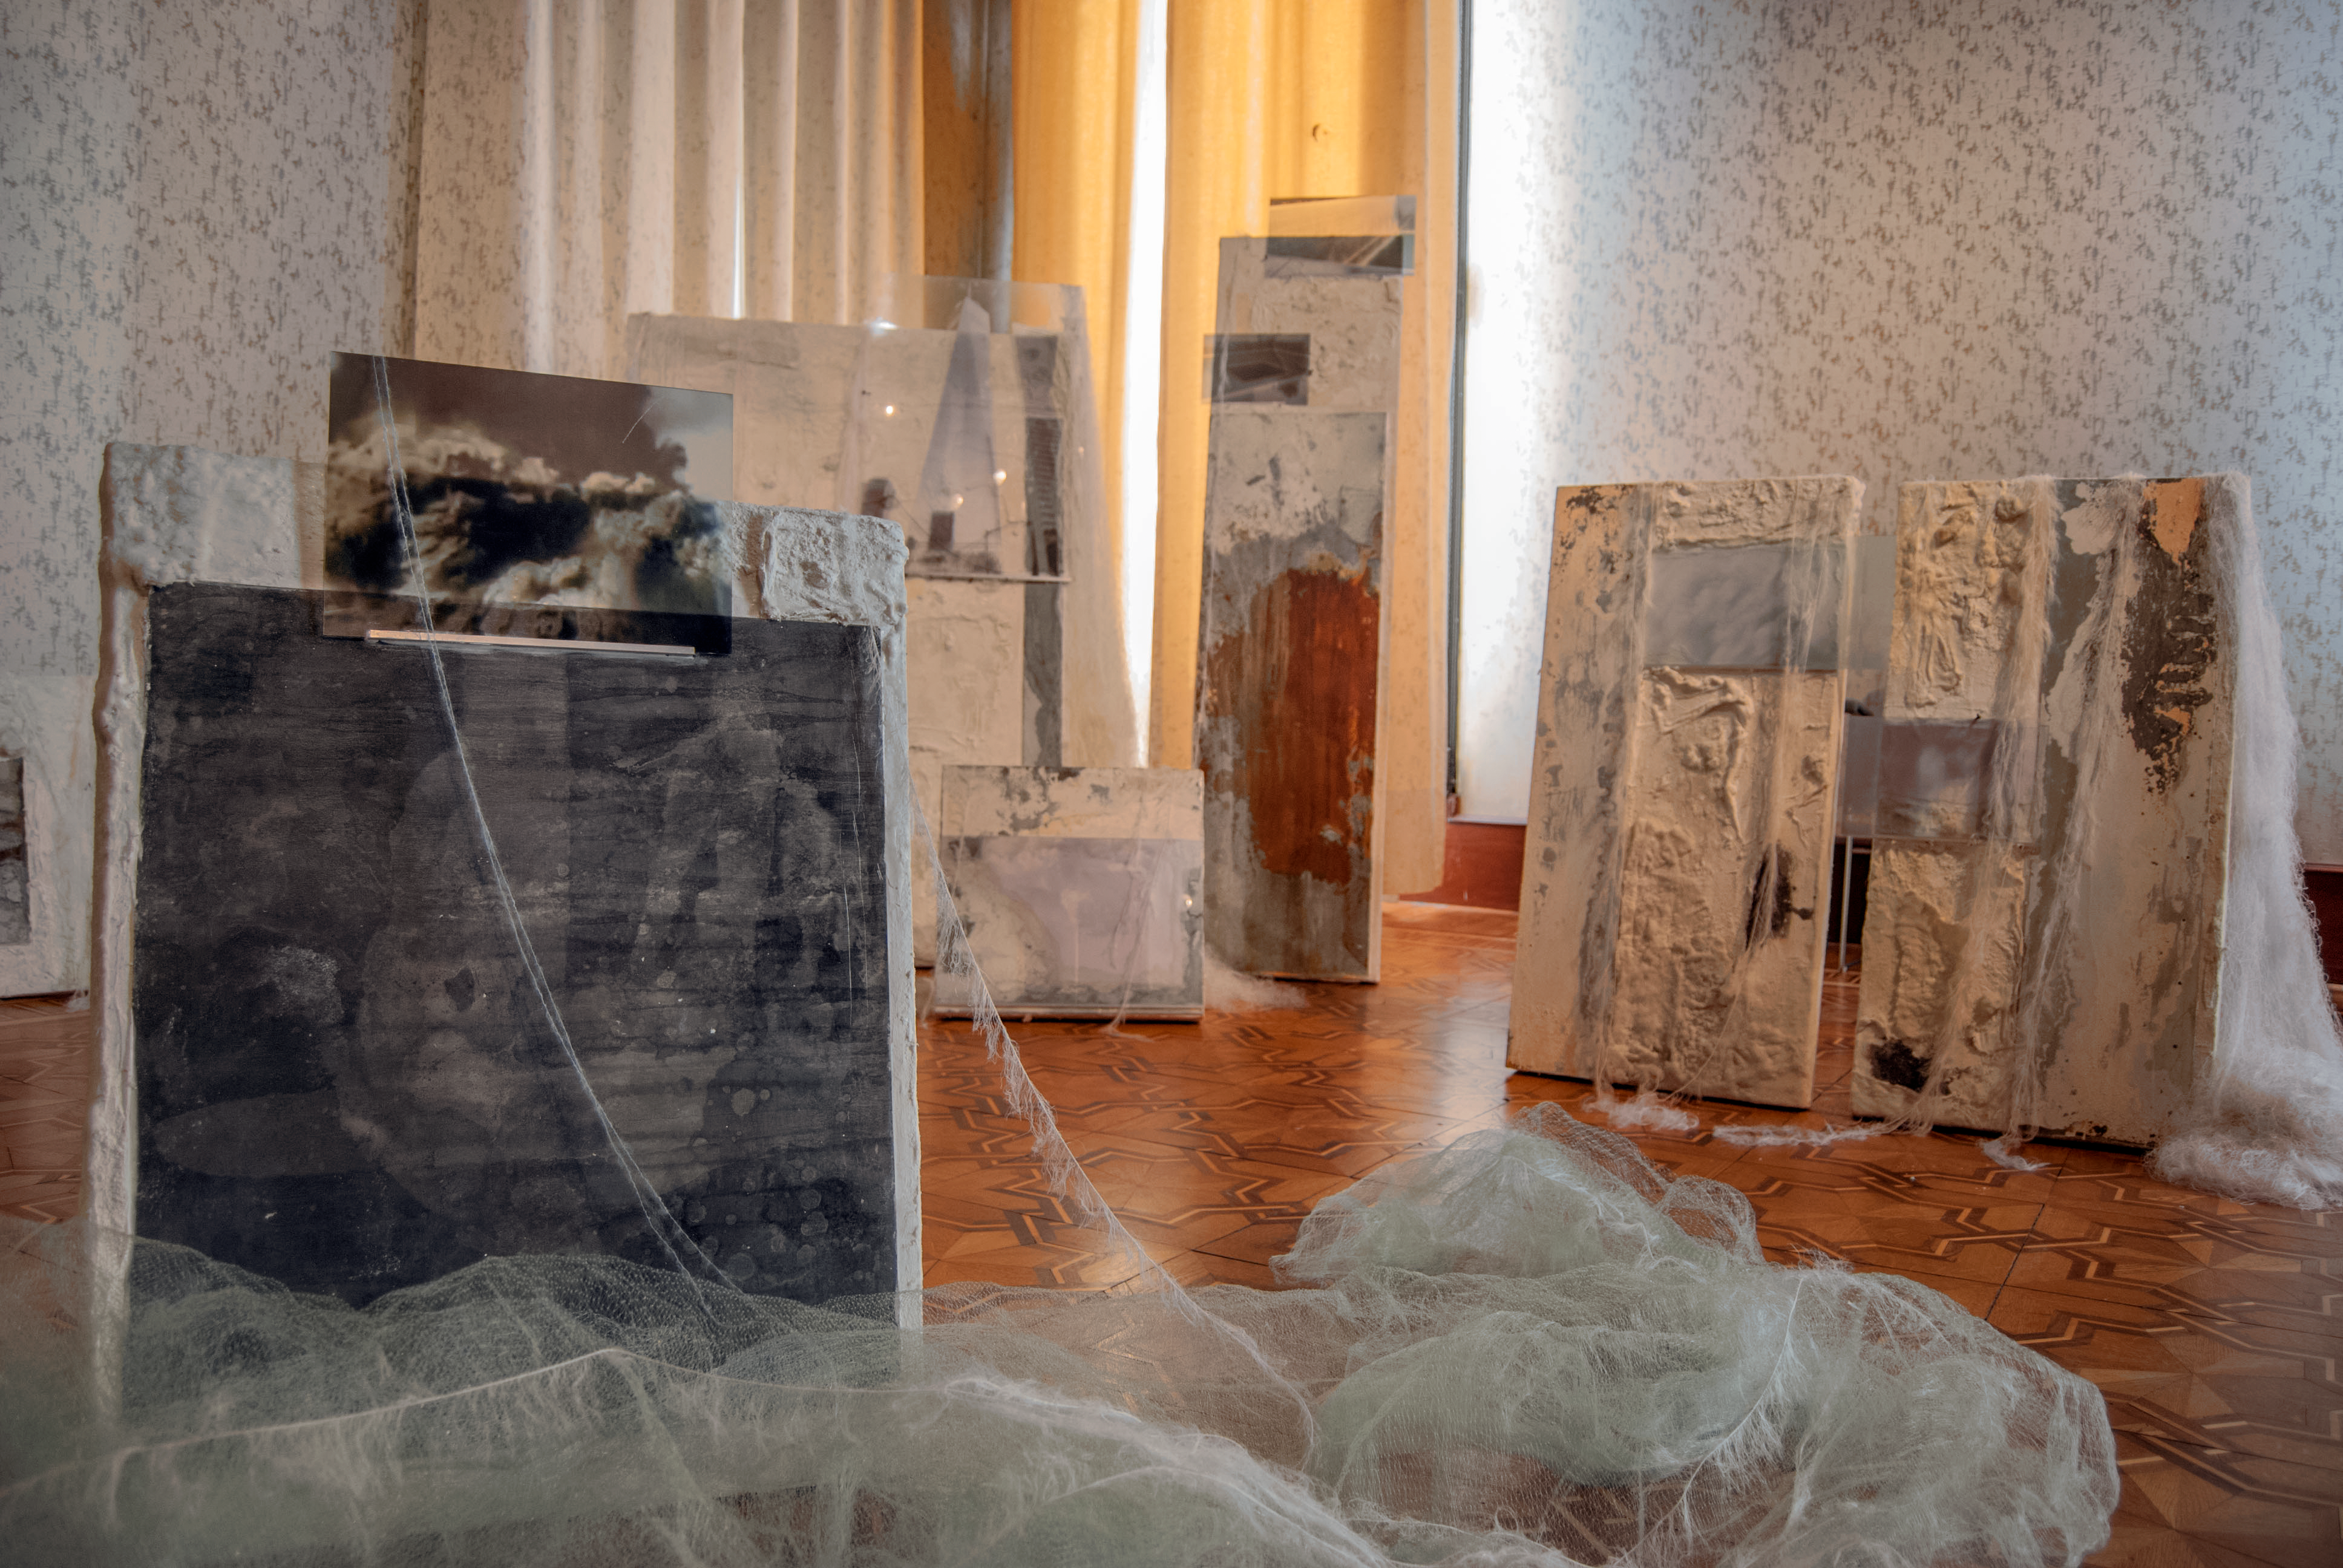

Our Place in Space — Birth and death of stars

Italian artist Dania Zanotto showed an installation that recreated the atmosphere of the many nebulae and clusters of stars Hubble has observed. She was mainly inspired by the famous Pillars of Creation, one of the most iconic images Hubble ever took.

Credit: ESA/Hubble, Pam Jeffries